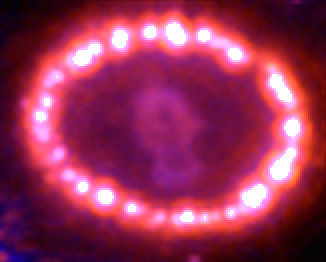

Supernova 1987A: December 6, 2006

This Hubble telescope image shows the supernova's triple-ring system, including the bright spots along the inner ring of gas surrounding the exploded star. A shock wave of material unleashed by the stellar blast is slamming into regions along the inner ring, heating them up, and causing them to glow. The ring, about a light-year across, was probably shed by the star about 20 000 years before it exploded.

Credit: NASA, ESA, and R. Kirshner (Harvard-Smithsonian Center for Astrophysics)